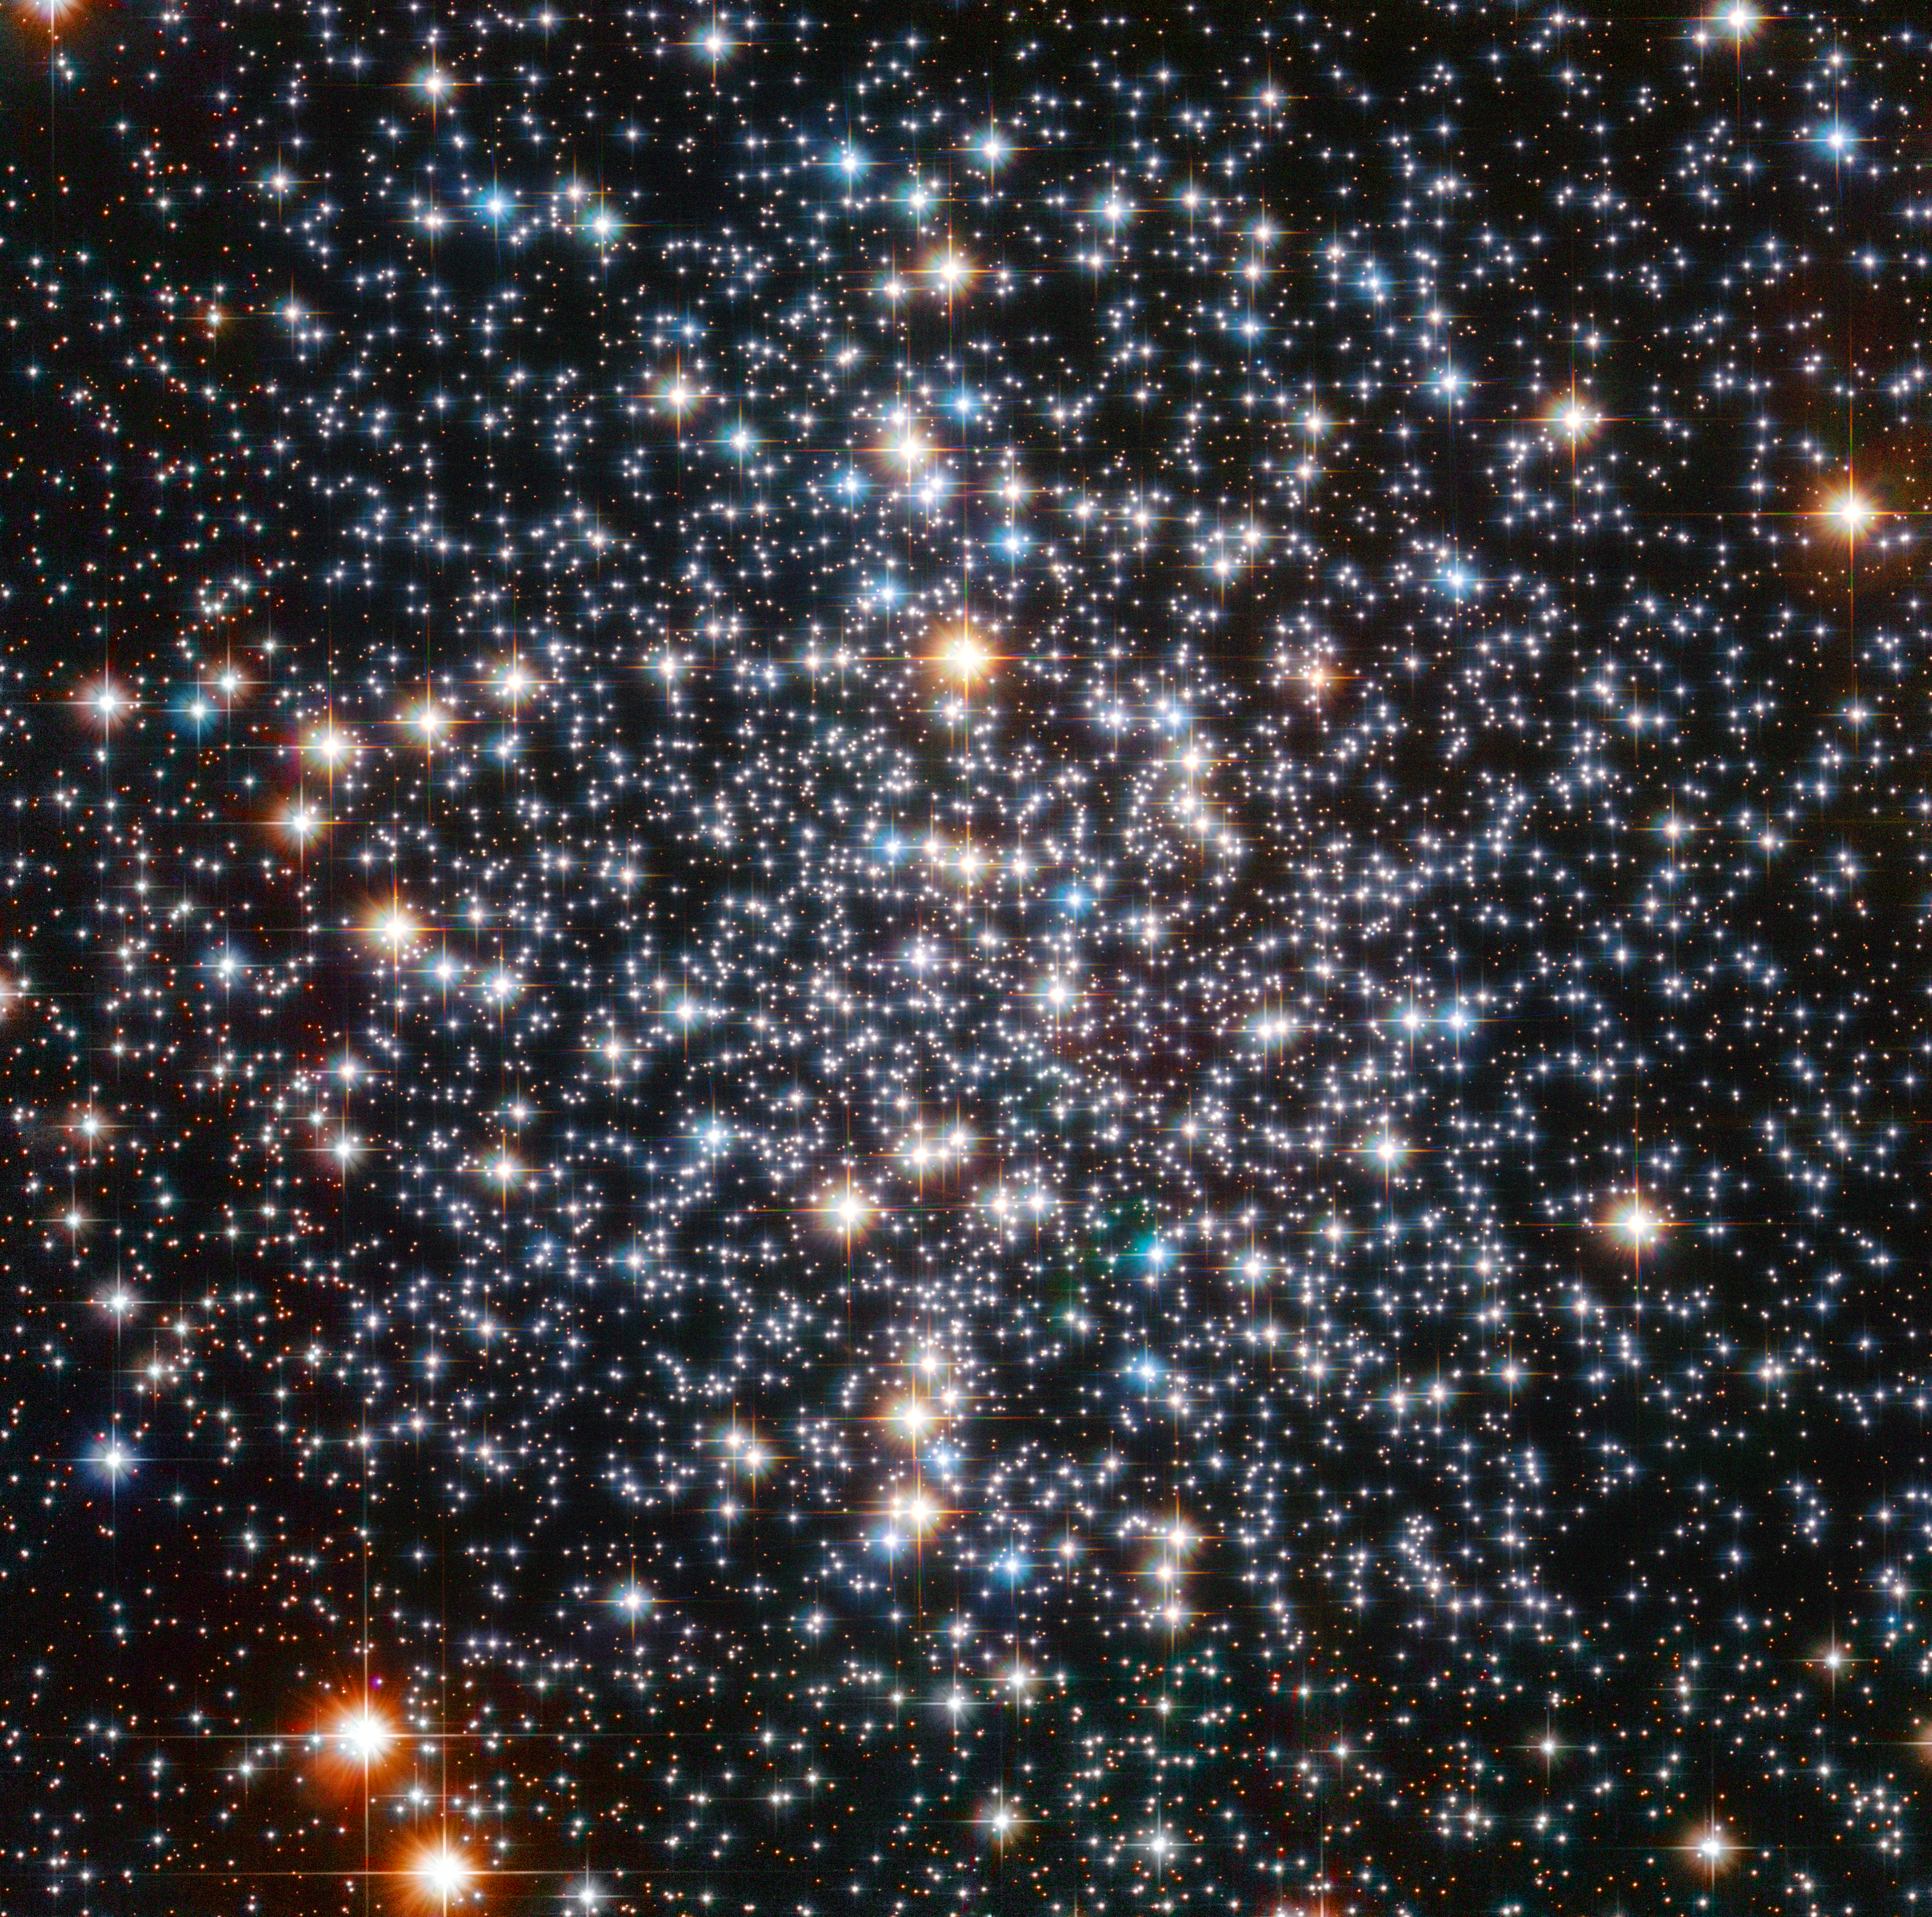

Globular Star Cluster M4

A Hubble Space Telescope image of the globular star cluster, Messier 4. The cluster is a dense collection of several hundred thousand stars. Astronomers suspect that an intermediate-mass black hole, weighing as much as 800 times the mass of our Sun, is lurking, unseen, at its core.

Credit: ESA/Hubble & NASA